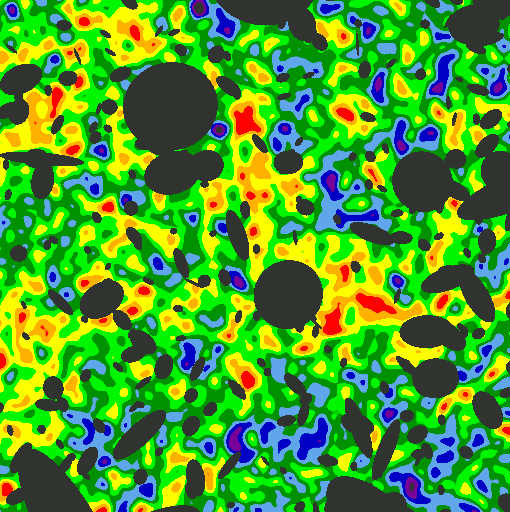

Hubble finds most of visible light in the Universe

A closer look at the Hubble Space Telescope's most detailed image, the Hubble Deep Field, reveals that the faint galaxies seen by Hubble could account for most of the visible light in the cosmos. "We appear close to completing a 'light census' of the universe,'' reports Michael S. Vogeley of the Princeton University Observatory. "The extraordinary smoothness of the background sky suggests that most of the visible light in the universe hails from galaxies that Hubble can detect.''

Credit: M. Vogeley (Princeton University Observatory) and NASA/ESA